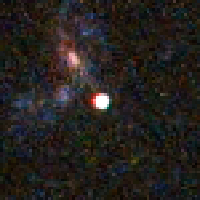

Distant Supernova 2 - After Outburst

Supernovae are extremely luminous and cause a burst of radiation that often briefly outshines an entire galaxy, before fading from view over several weeks or months. During this short interval a supernova can radiate as much energy as the Sun is expected to emit over its entire life span.

Credit: NASA/ESA and A. Riess (STScI)